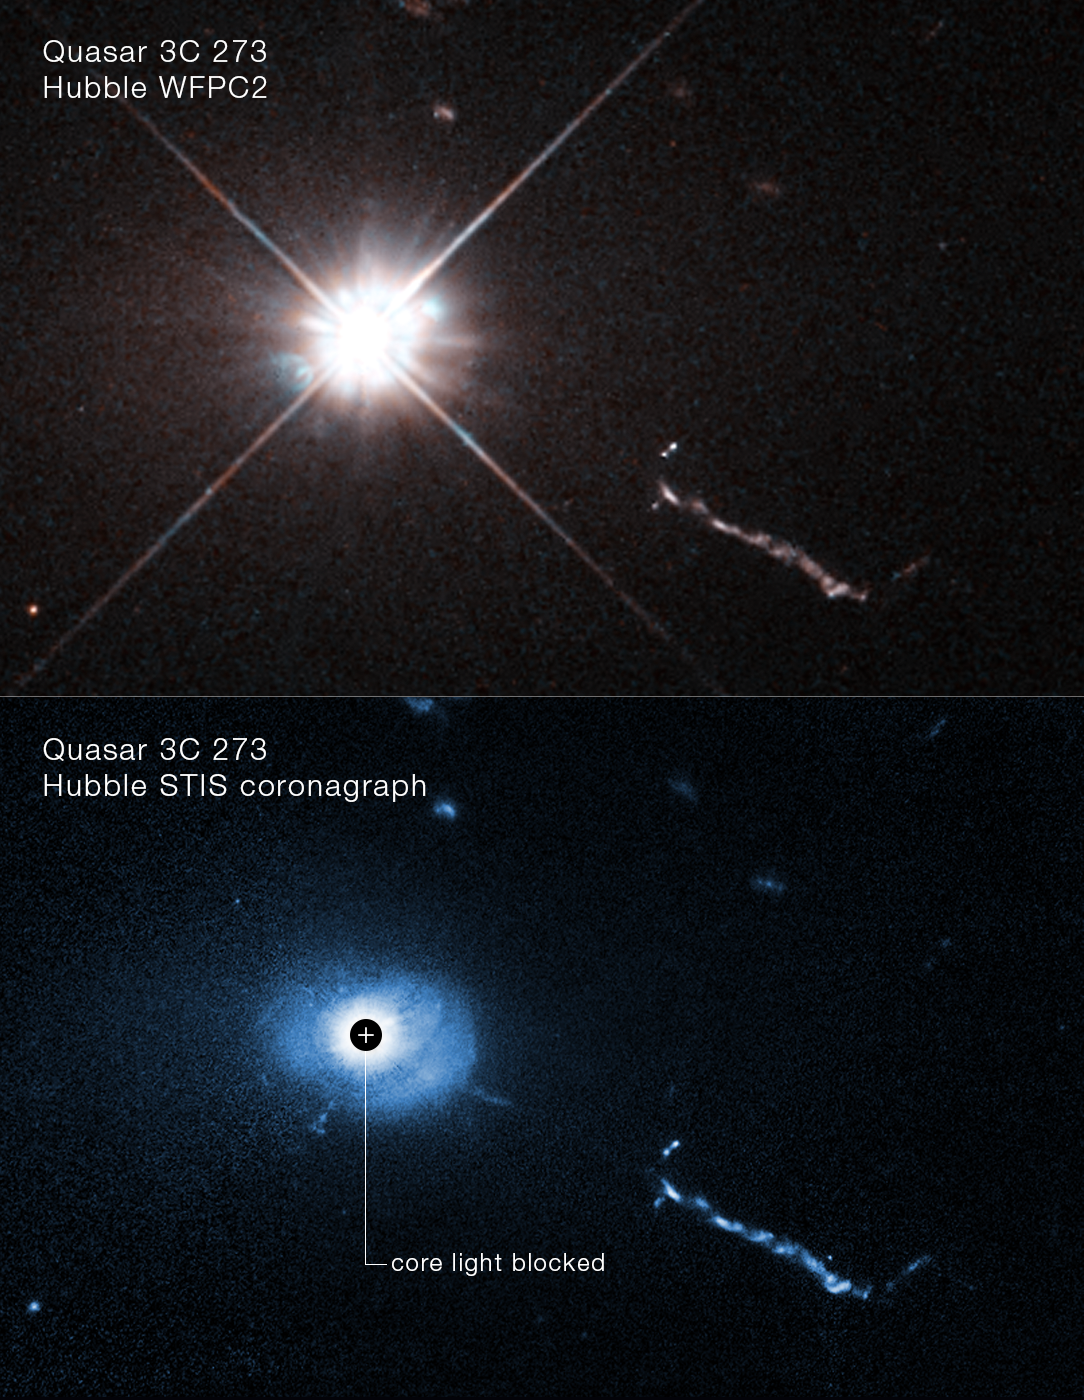

Hubble view of heart of quasar 3C 273

A NASA/ESA Hubble Space Telescope image of the core of quasar 3C 273. A coronagraph on Hubble blocks out the glare coming from the supermassive black hole at the heart of the quasar. This allows astronomers to see unprecedented details near the black hole: weird filaments, lobes, and a mysterious L-shaped structure, probably caused by small galaxies being devoured by the black hole. Located 2.5 billion light-years away, 3C 273 is the first quasar (quasi-stellar object) ever discovered, in 1963.

Credit: NASA, ESA, Bin Ren (Côte d’Azur Observatory)